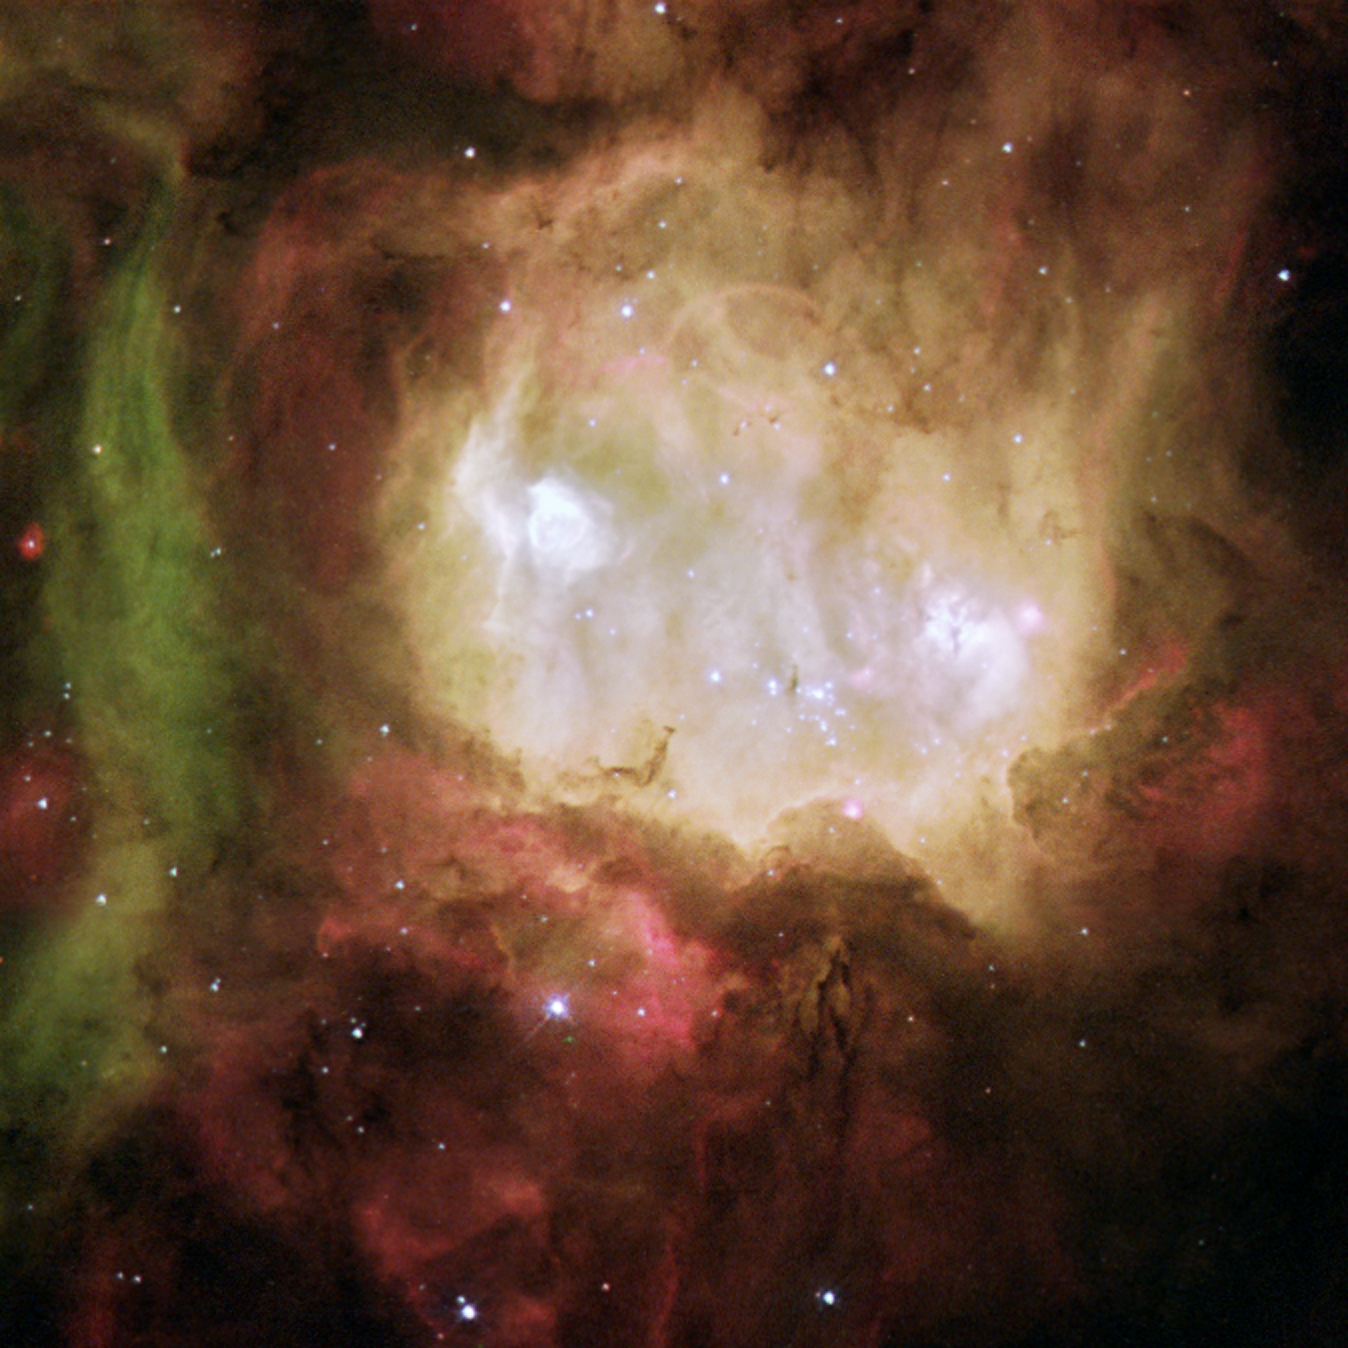

Nebula NGC 2080, nicknamed the 'Ghost Head Nebula'

The 'Ghost Head Nebula' is one of a chain of star-forming regions lying south of the 30 Doradus nebula in the Large Magellanic Cloud. Two bright regions (the 'eyes of the ghost'), named A1 (left) and A2 (right), are very hot, glowing 'blobs' of hydrogen and oxygen. The bubble in A1 is produced by the hot, intense radiation and powerful stellar wind from a single massive star. A2 has a more complex appearance due to the presence of more dust, and it contains several hidden, massive stars. The massive stars in A1 and A2 must have formed within the last 10 000 years since their natal gas shrouds are not yet disrupted by the powerful radiation of the newly born stars.

Credit: ESA, NASA, & Mohammad Heydari-Malayeri (Observatoire de Paris, France)